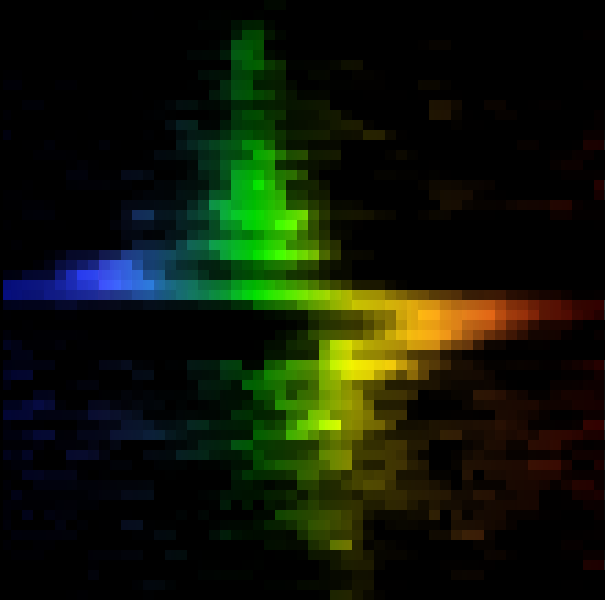

Galaxy M84 Nucleus

This colorful 'zigzag' is not the work of a flamboyant artist, but the signature of a supermassive black hole in the center of galaxy M84, discovered by Hubble Space Telescope's Space Telescope Imaging Spectrograph (STIS).

Credit: Gary Bower, Richard Green (NOAO), the STIS Instrument Definition Team, and NASA/ESA